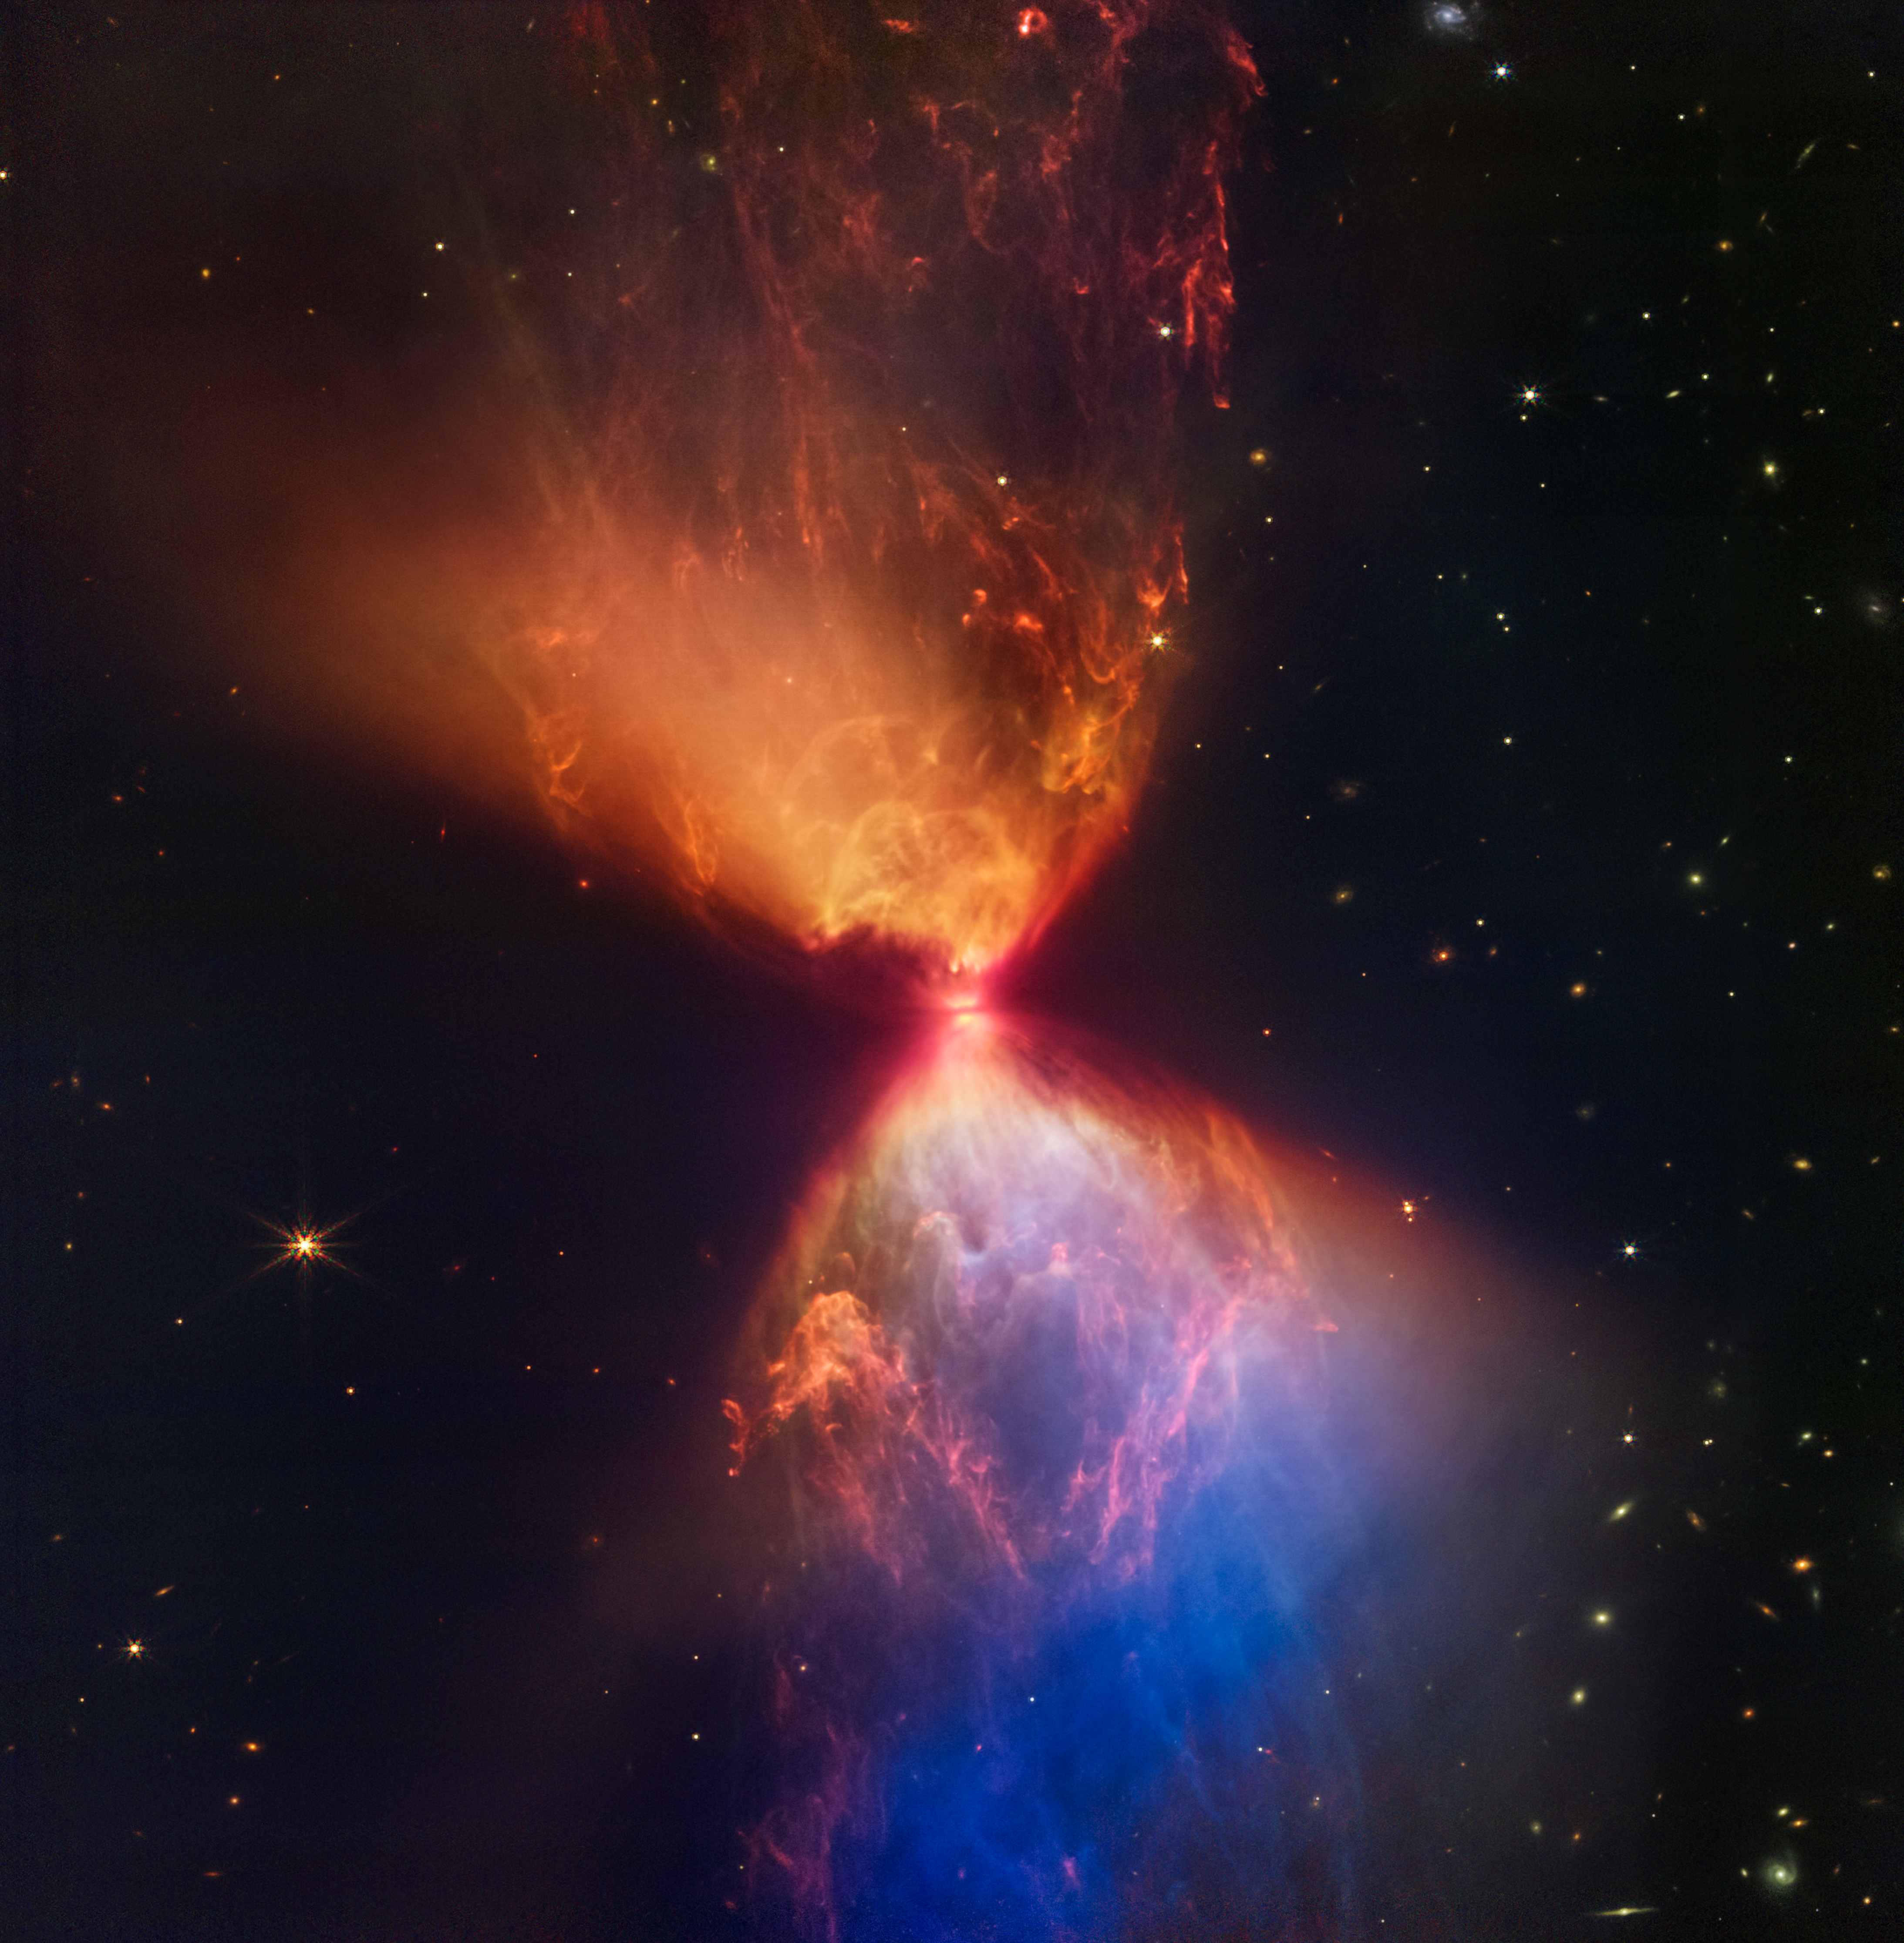

Protostar L1527

The protostar L1527, shown in this image from the NASA/ESA/CSA James Webb Space Telescope, is embedded within a cloud of material that is feeding its growth. Material ejected from the star has cleared out cavities above and below it, whose boundaries glow orange and blue in this infrared view. The upper central region displays bubble-like shapes due to stellar ‘burps,’ or sporadic ejections. Webb also detects filaments made of molecular hydrogen that has been shocked by past stellar ejections. Intriguingly, the edges of the cavities at upper left and lower right appear straight, while the boundaries at upper right and lower left are curved. The region at lower right appears blue, as there’s less dust between it and Webb than the orange regions above it.

Credit: NASA, ESA, CSA, and STScI, J. DePasquale (STScI)